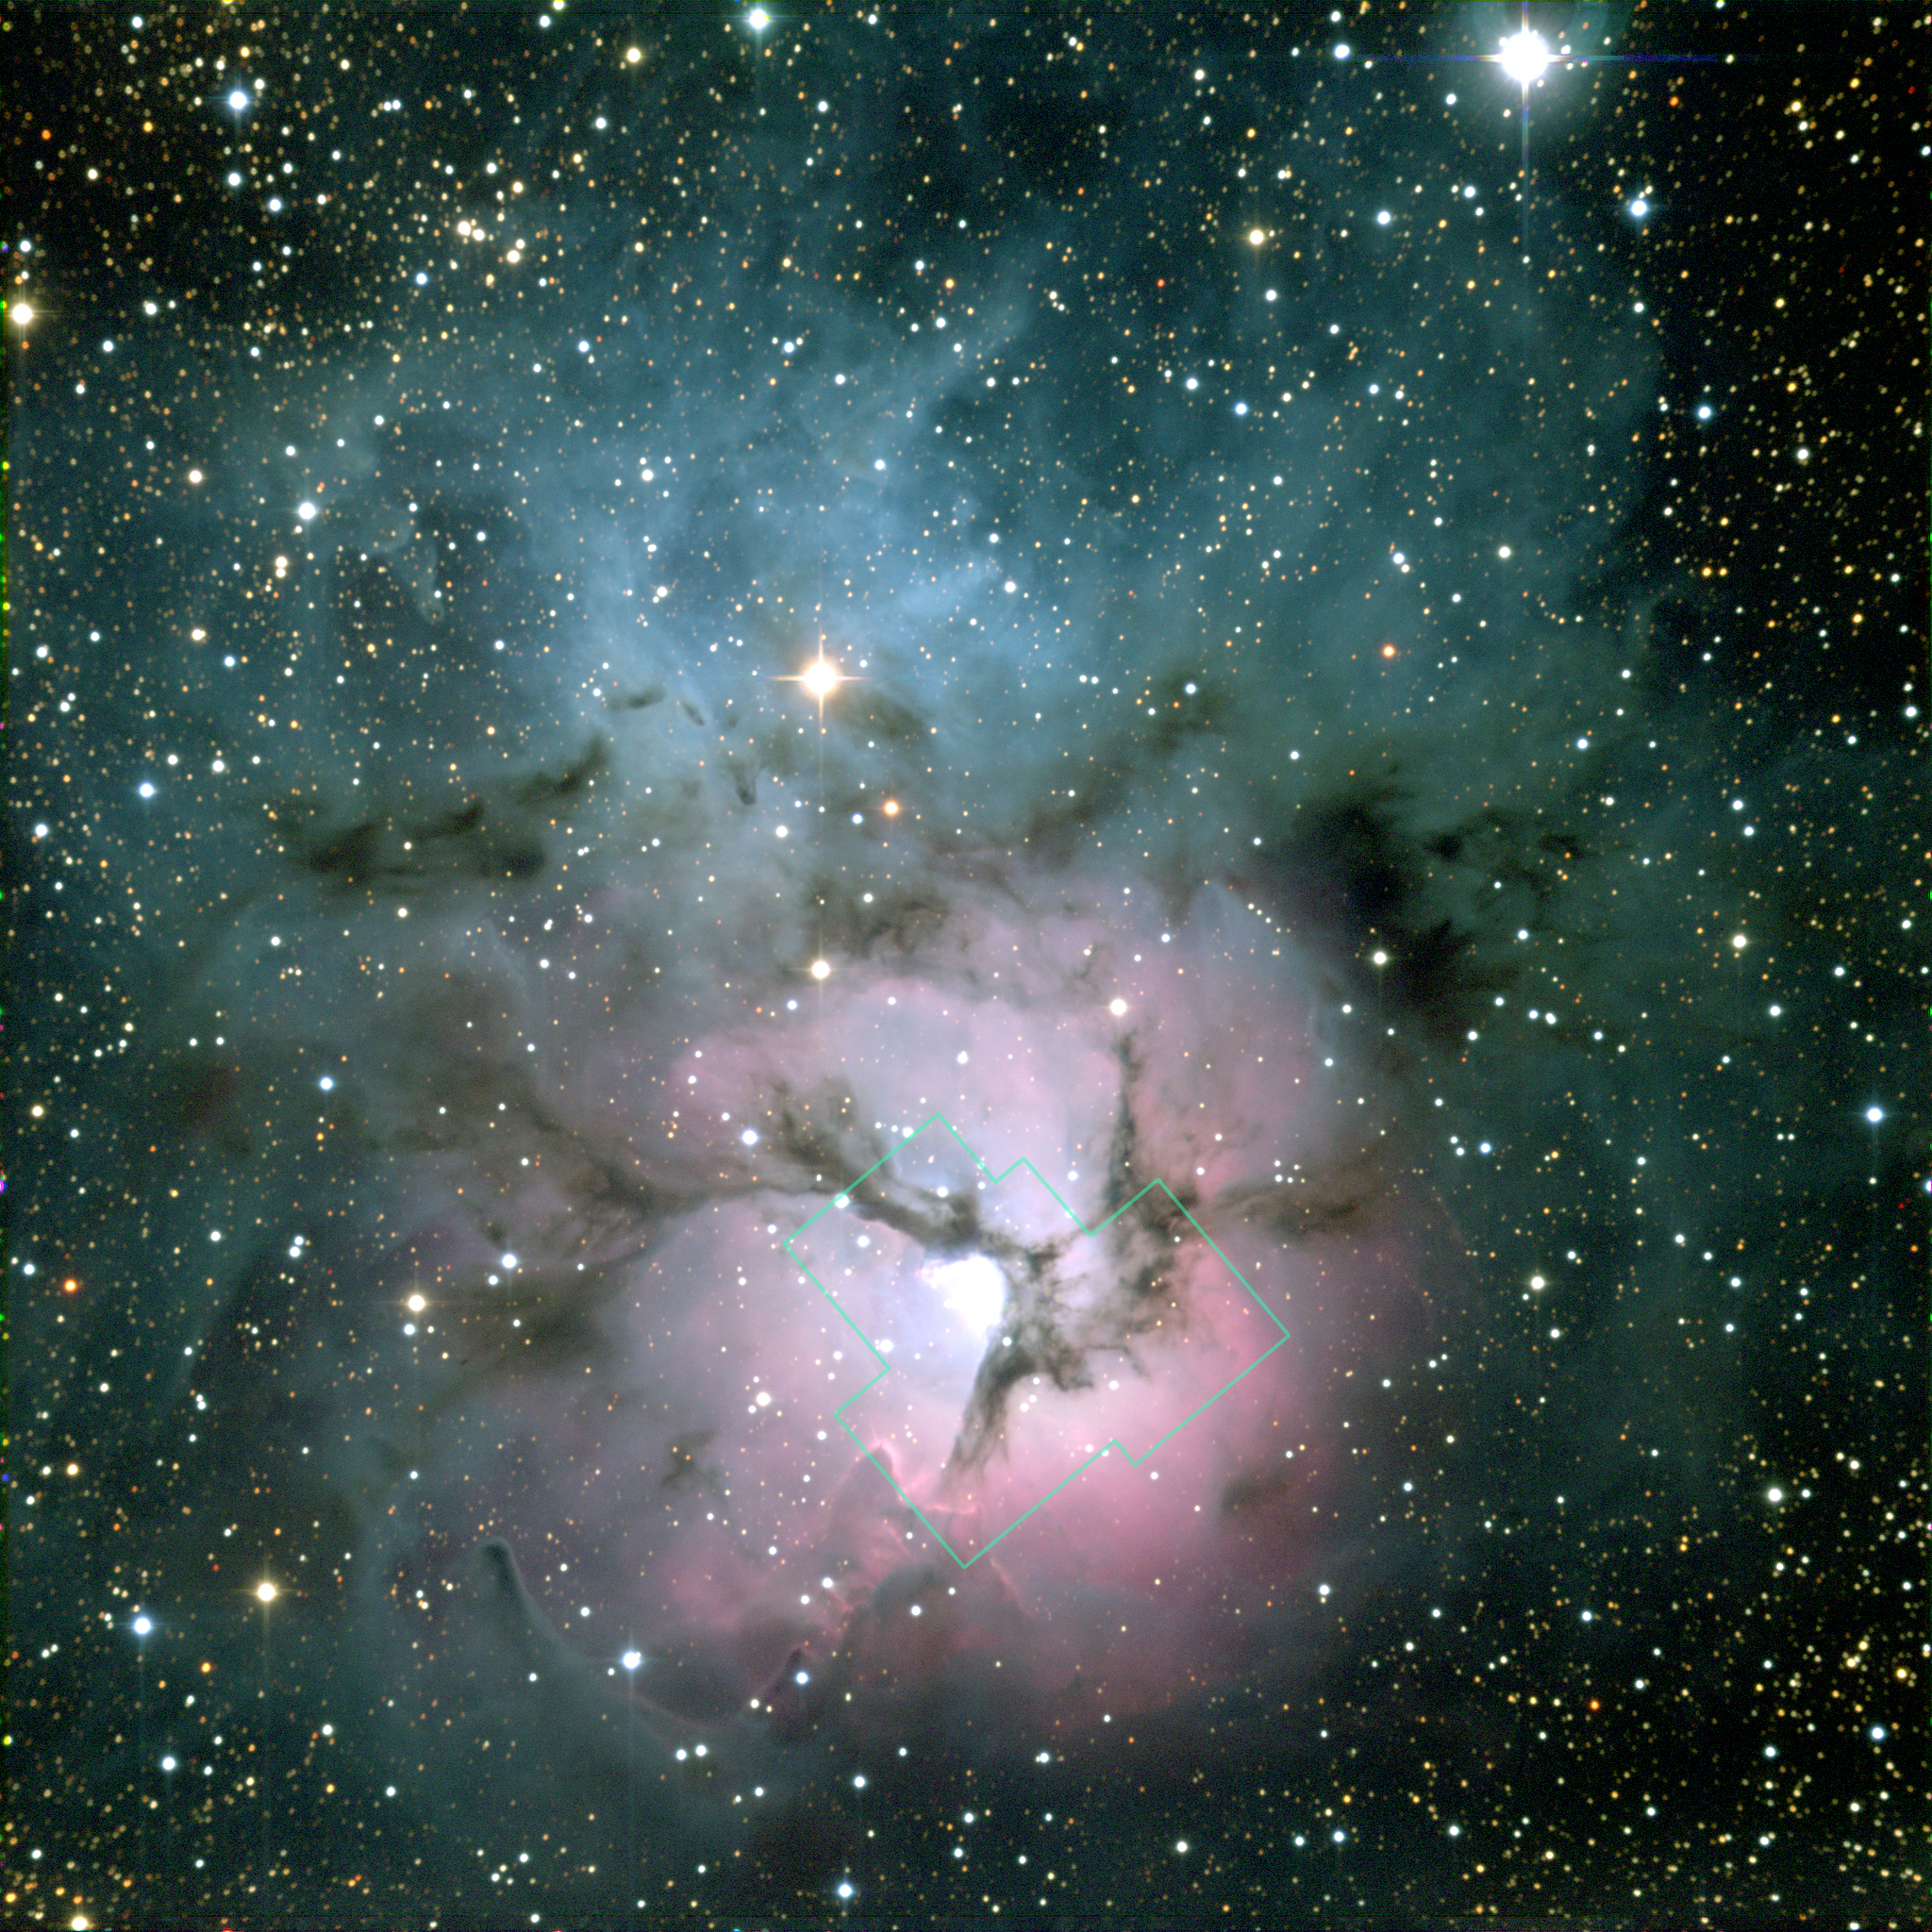

NOAO image of Trifid Nebula

Three huge intersecting dark lanes of interstellar dust make the Trifid Nebula one of the most recognizable and striking star birth regions in the night sky. The dust, silhouetted against glowing gas and illuminated by starlight, cradles the bright stars at the heart of the Trifid Nebula. This nebula, also known as Messier 20 and NGC 6514, lies within our own Milky Way Galaxy about 9,000 light-years (2,700 parsecs) from Earth, in the constellation Sagittarius.

Credit: NOAO